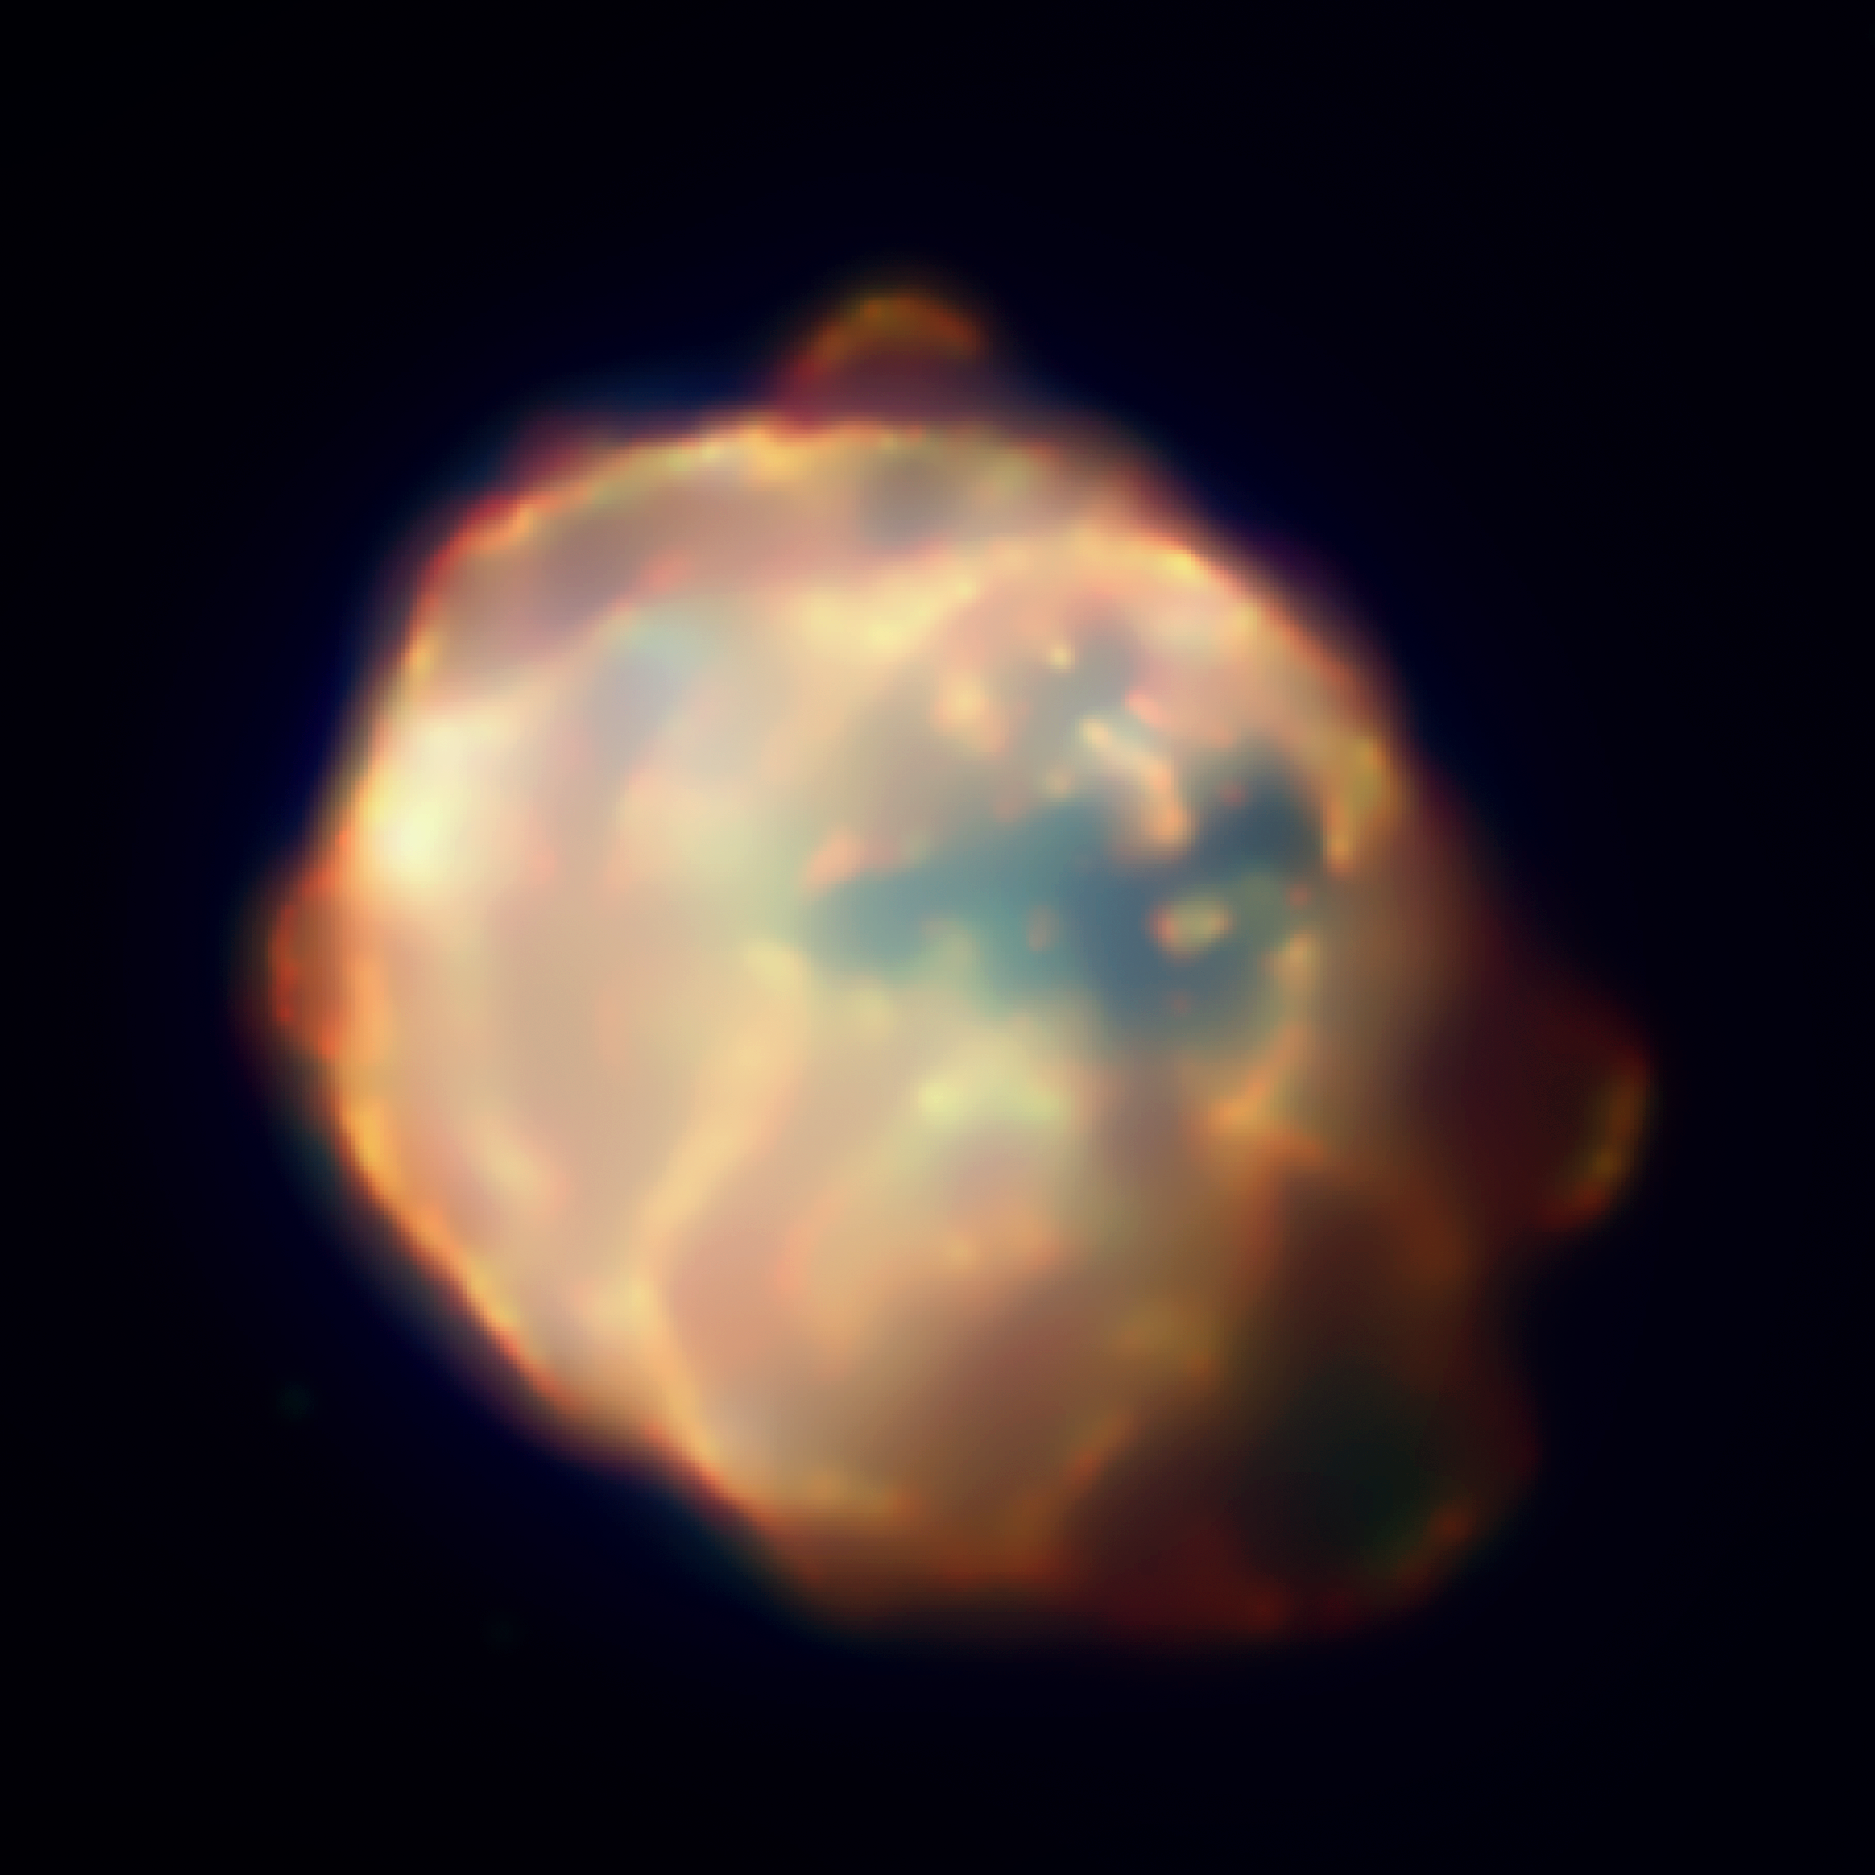

Chandra 3-Color X-ray Image of N 63A

Chandra's image of N63A shows material heated to about ten million degrees Celsius by a shock wave generated by the supernova explosion. The fluffy crescent-shaped X-ray features that appear around the edge of the remnant are thought to be fragments of high-speed matter shot out from the star when it exploded, like shrapnel from a bomb. The colours red, green and blue in the image correspond to low, medium and high-energy X-rays, respectively. The image is 112 arcsec per side

Credit: NASA/CXC/Rutgers/J.Warren et al.